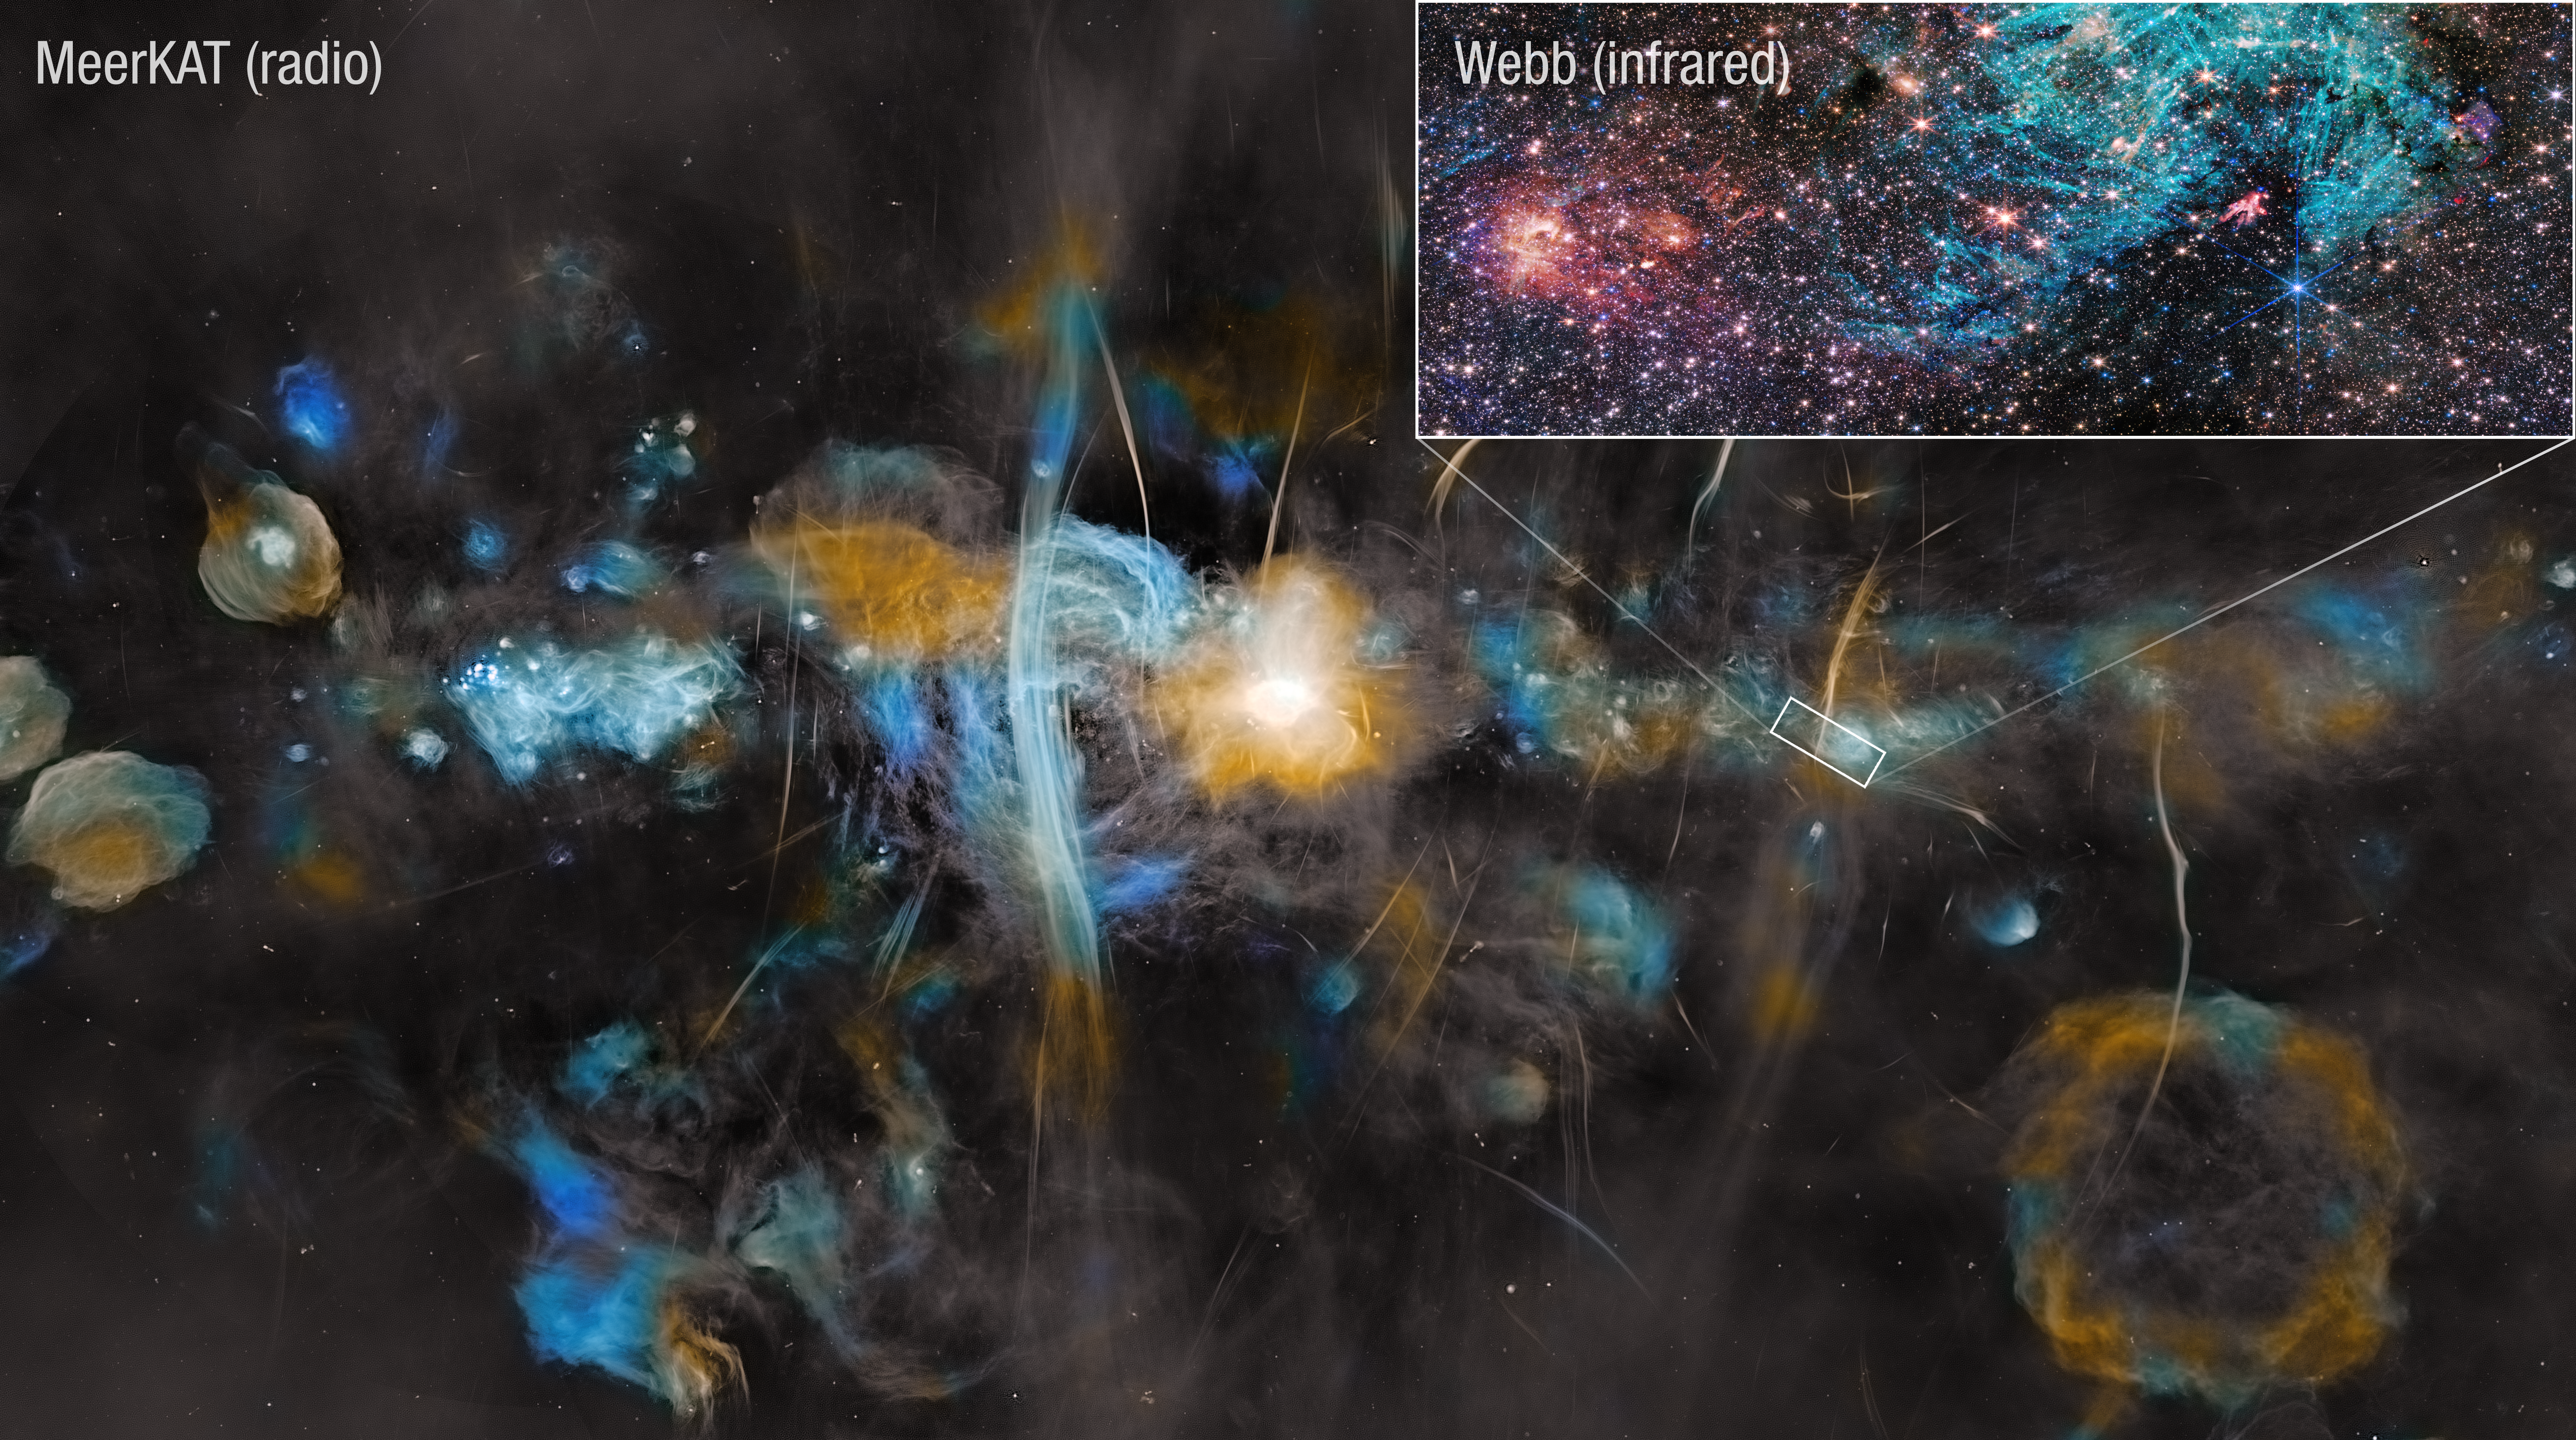

Milky Way Center (MeerKAT and Webb)

Follow-up research on a 2023 image of the Sagittarius C stellar nursery in the heart of our Milky Way galaxy, captured by the NASA/ESA/CSA James Webb Space Telescope, has revealed ejections from still-forming protostars and insights into the impact of strong magnetic fields on interstellar gas and the life cycle of stars.

This image of the Milky Way captured by the MeerKAT radio telescope array puts Webb’s image of the Sagittarius C region in context. The MeerKAT image spans 1,000 light-years, while the Webb image covers 44 light-years.

At the center of the MeerKAT image the region surrounding the Milky Way’s supermassive black hole blazes bright. Huge vertical filamentary structures echo those captured on a smaller scale by Webb in Sagittarius C’s blue-green hydrogen cloud. Like a super-long exposure photograph, MeerKAT shows the bubble-like remnants of supernovas that exploded over millennia, capturing the dynamic nature of the Milky Way’s chaotic core.

Astronomers think the strong magnetic fields in the heart of the galaxy are shaping the filaments seen by MeerKAT and Webb, and may also play a role in suppressing star formation in the region. Though there is a rich cloud of raw star-making material in Sagittarius C, star formation rates are not as high as astronomers expect. Instead, magnetic fields may be strong enough to resist the gravity that would typically cause dense clouds of gas and dust to collapse and forge stars.

Credit: NASA, ESA, CSA, STScI, SARAO, S. Crowe (UVA), J. Bally (CU), R. Fedriani (IAA-CSIC), I. Heywood (Oxford)